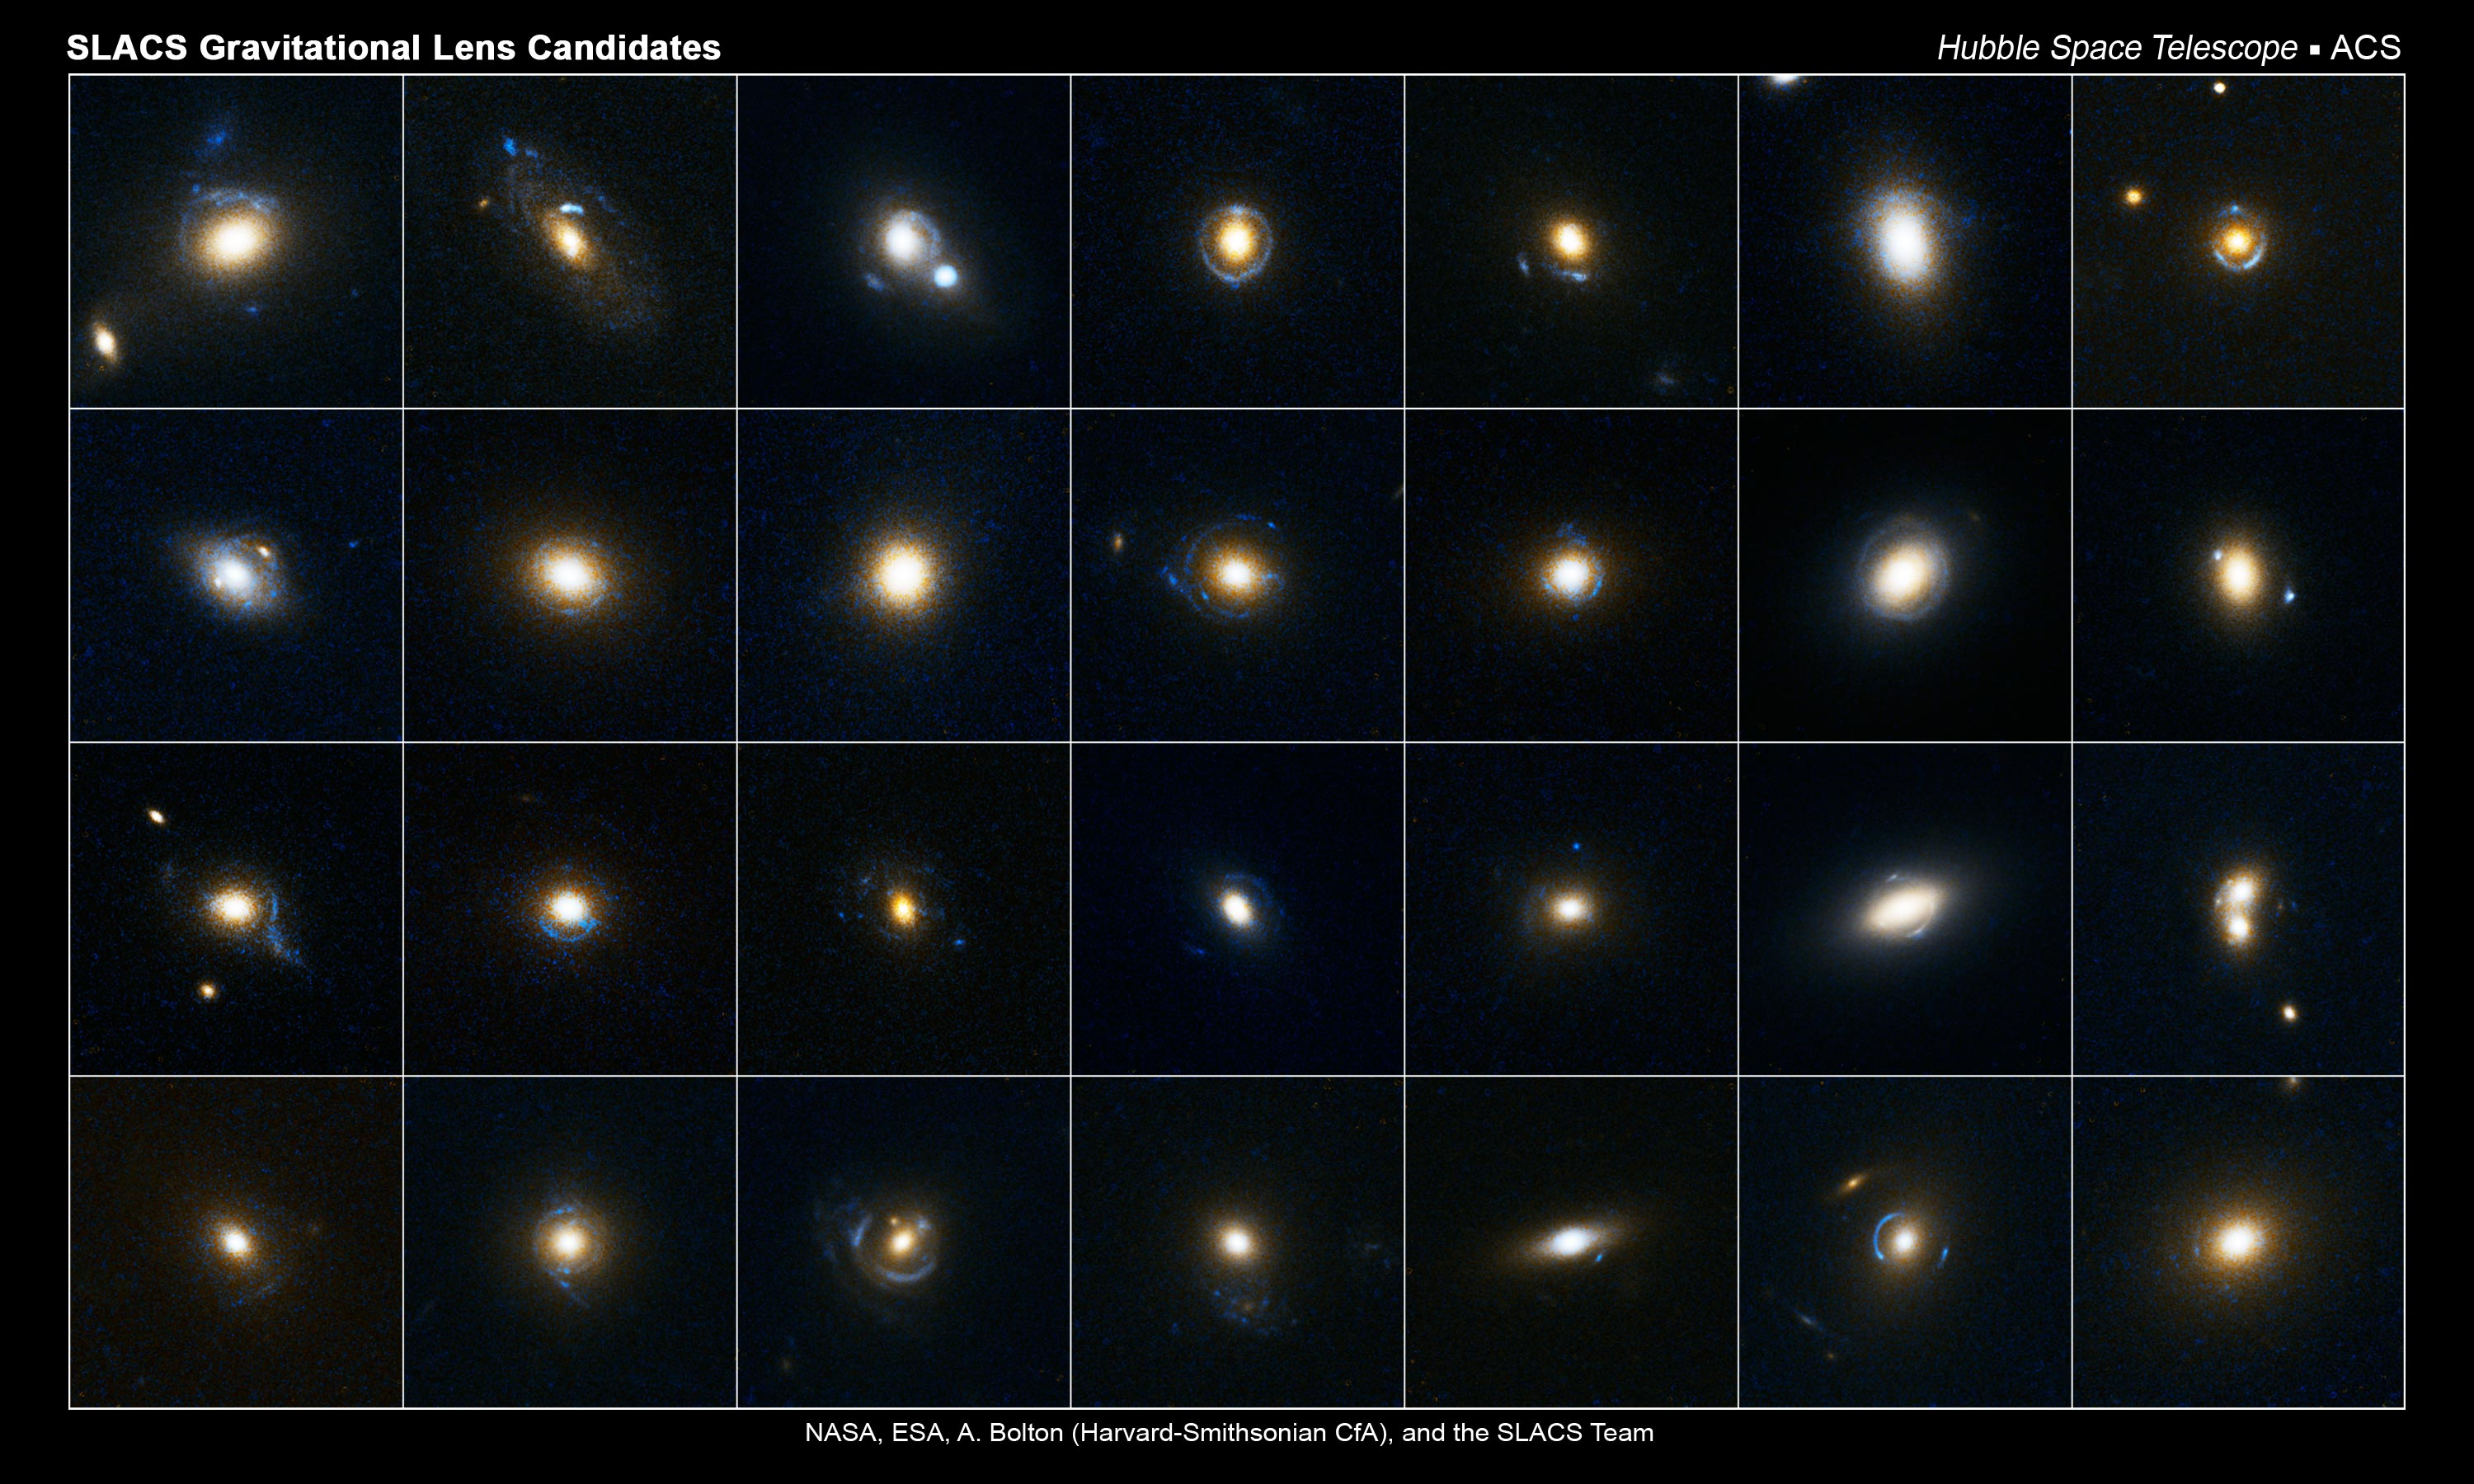

Slacs gravitational lens candidates

This collection of images shows 28 gravitational lens candidates. Astronomers studied these photos, which were taken by the Hubble Space Telescope's Advanced Camera for Surveys, and identified which of the candidates were gravitational lenses. These candidates were selected from the Sloan Digital Sky Survey. Gravitational lensing occurs when the gravitational field from a massive object warps space and deflects light from a distant object behind it. The reddish-white objects in the center of each image are massive galaxies. The blue arc-like patterns around many of the galaxies are the smeared light from distant galaxies that are behind the massive galaxies.

Credit: NASA, ESA, A. Bolton (Harvard-Smithsonian CfA) and the SLACS Team